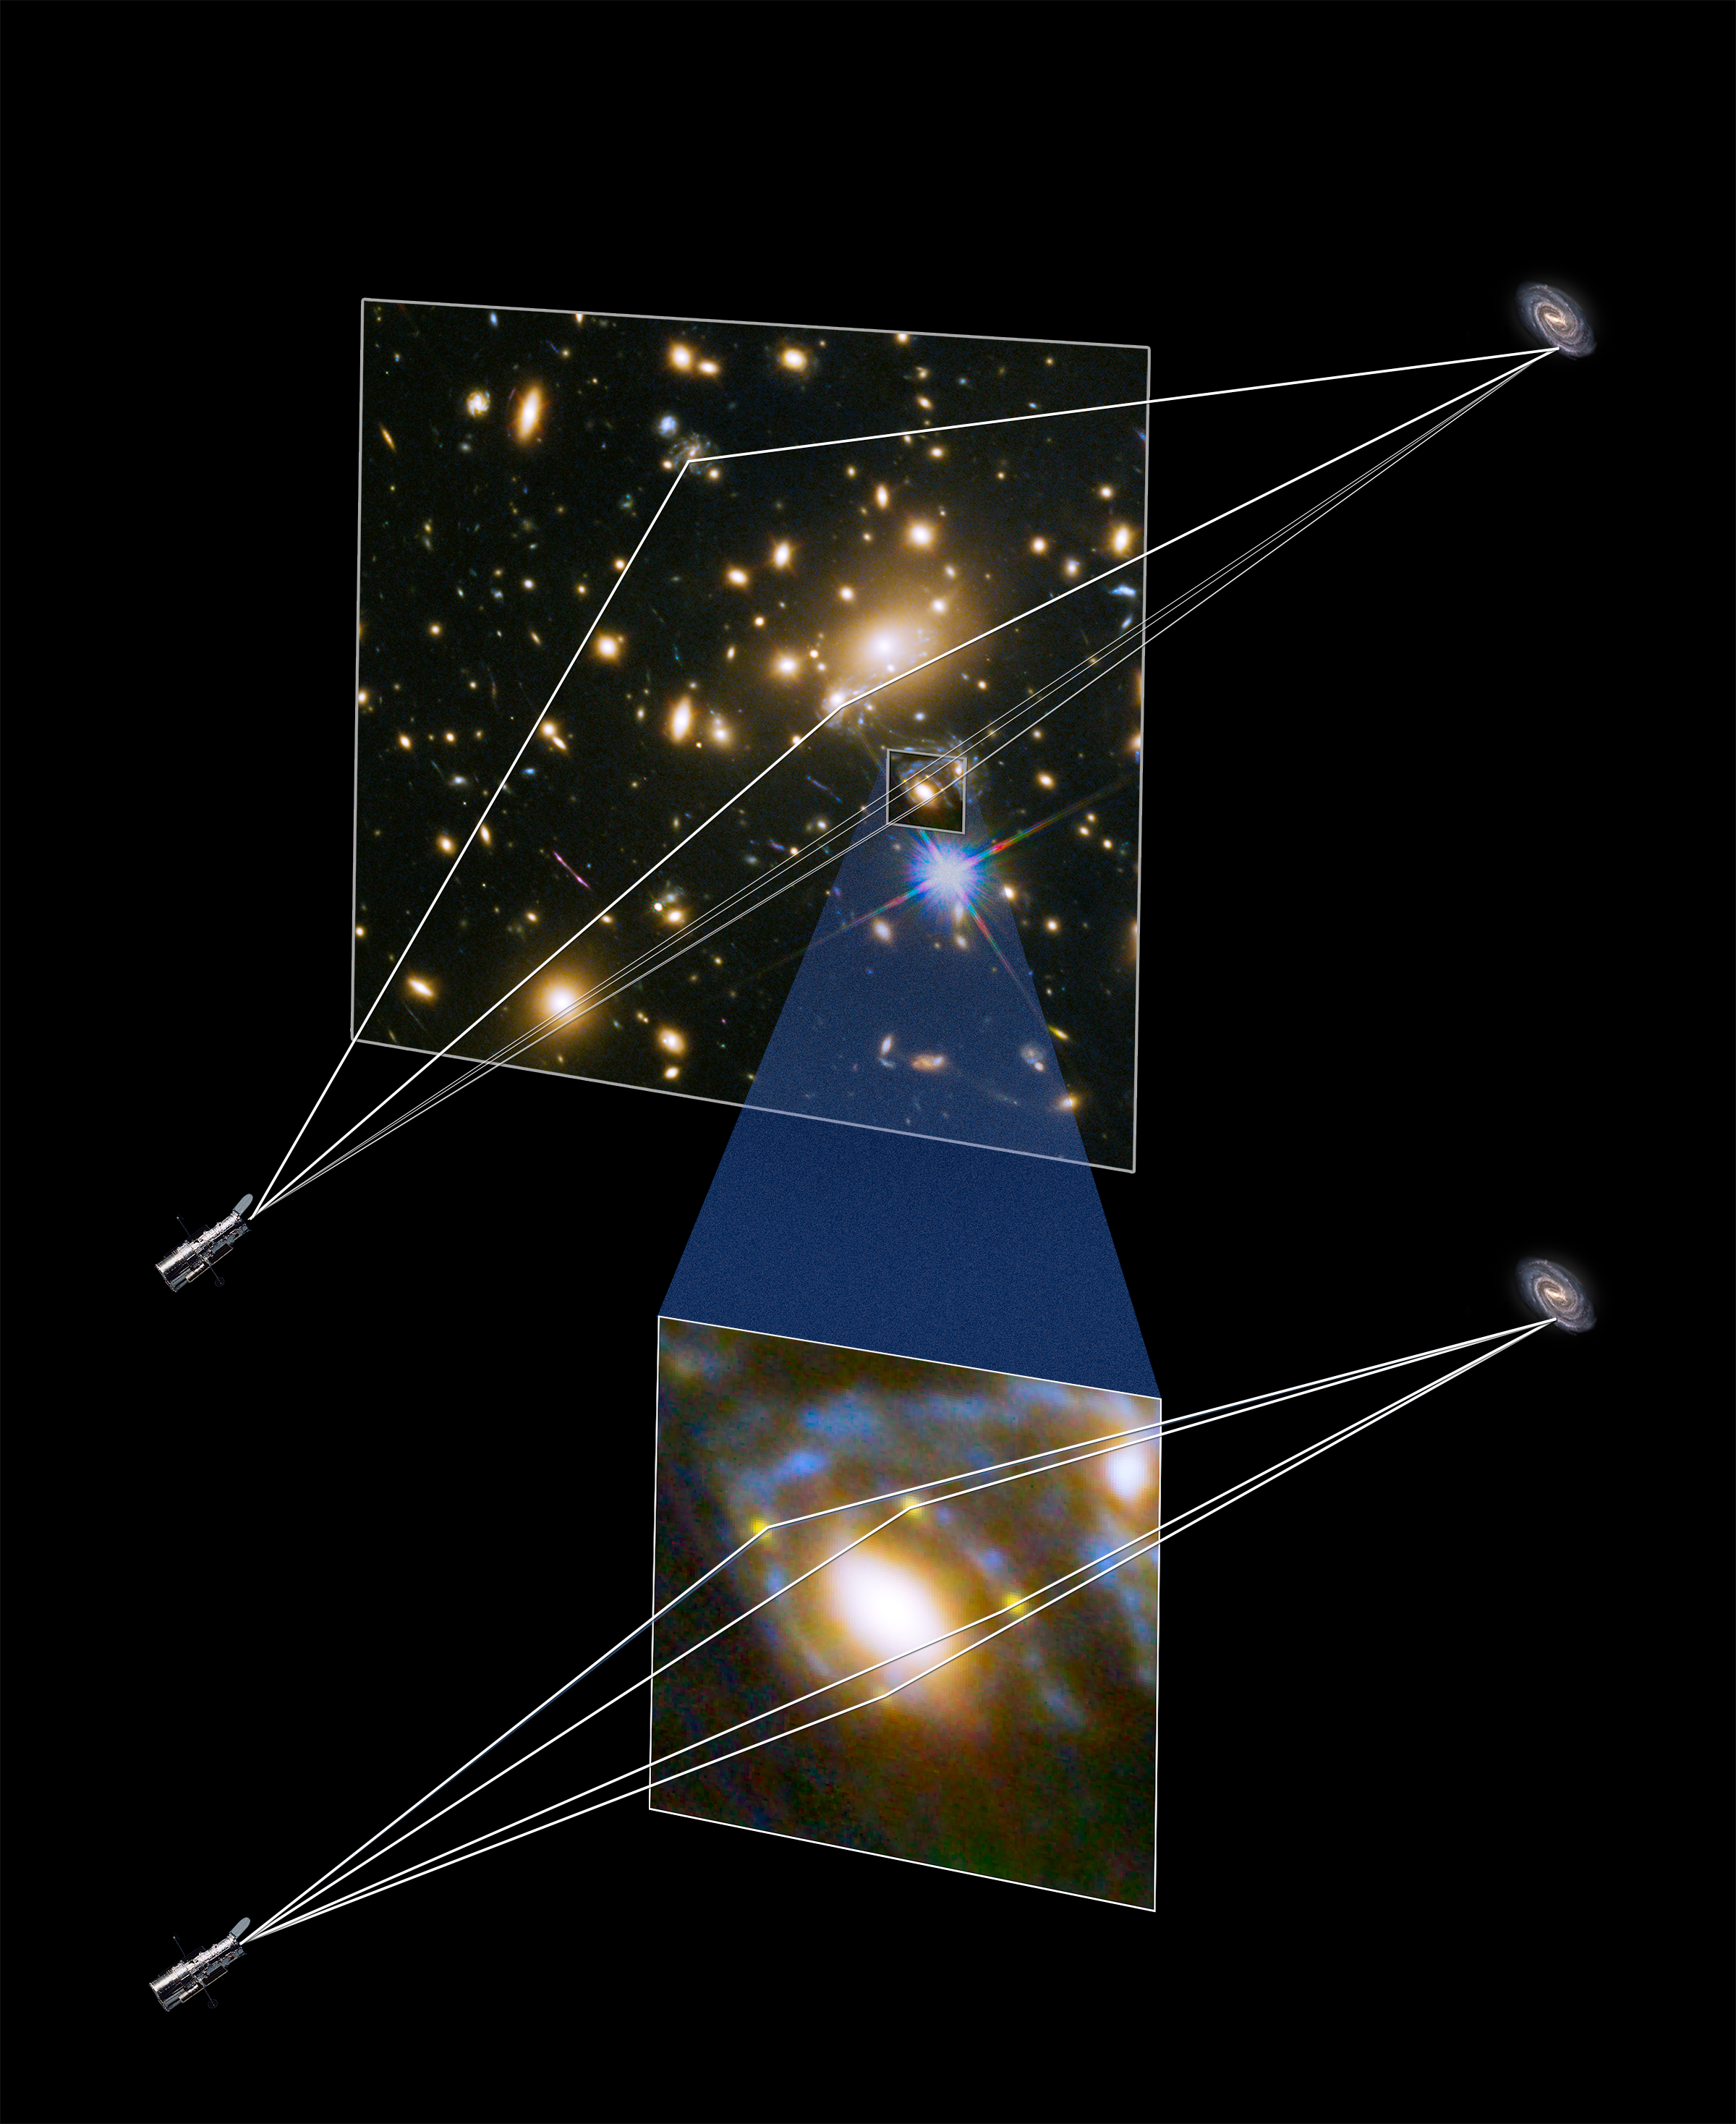

Illustration showing gravitational lensing producing four supernova images

This illustration shows how four different images of the same supernova were created when its light was distorted and magnified by the huge galaxy cluster MACS J1149+2223 in front of it.

The light has been magnified and distorted due to gravitational lensing and as a result the images are arranged around the elliptical galaxy in a formation known as an Einstein cross.

The massive galaxy cluster focuses the supernova light along at least three separate paths, and then when one of those light paths happens to be precisely aligned with a single elliptical galaxy within the cluster, a secondary lensing effect occurs. The dark matter associated with the elliptical galaxy bends and refocuses the light into four more paths, generating the rare Einstein cross pattern that the team observed.

Credit: NASA & ESA